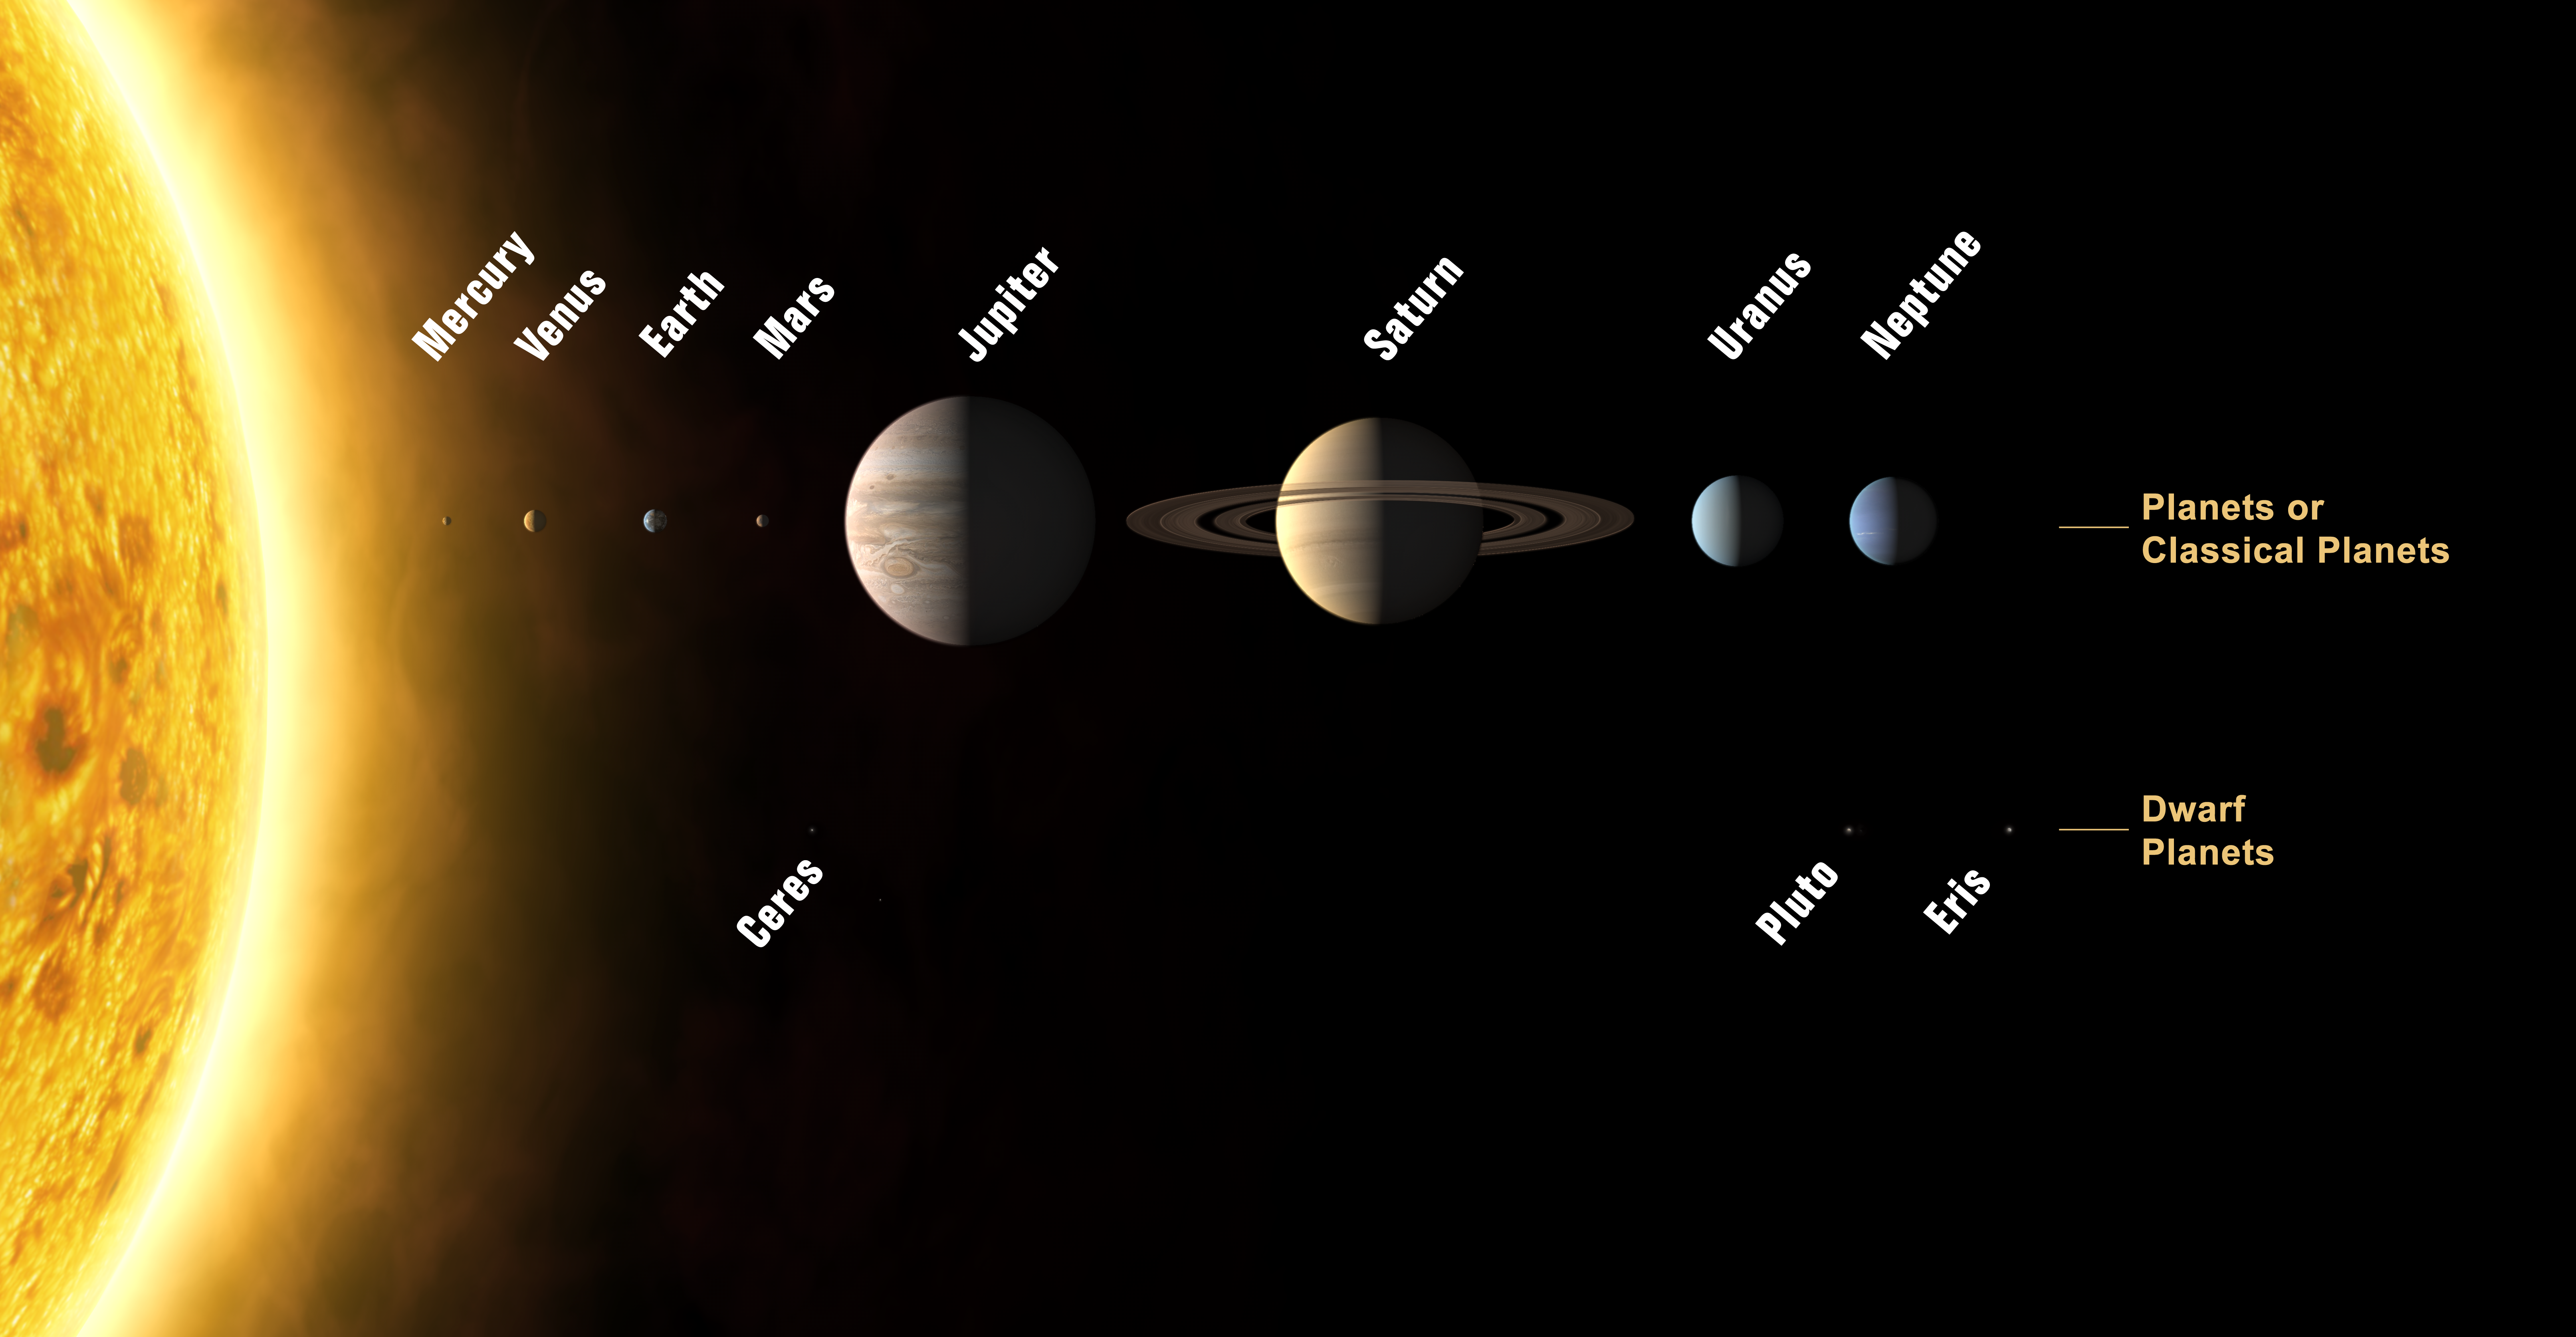

The Solar System

This annotated image shows an artist's impression of the Solar System

Credit: The International Astronomical Union/Martin Kornmesser